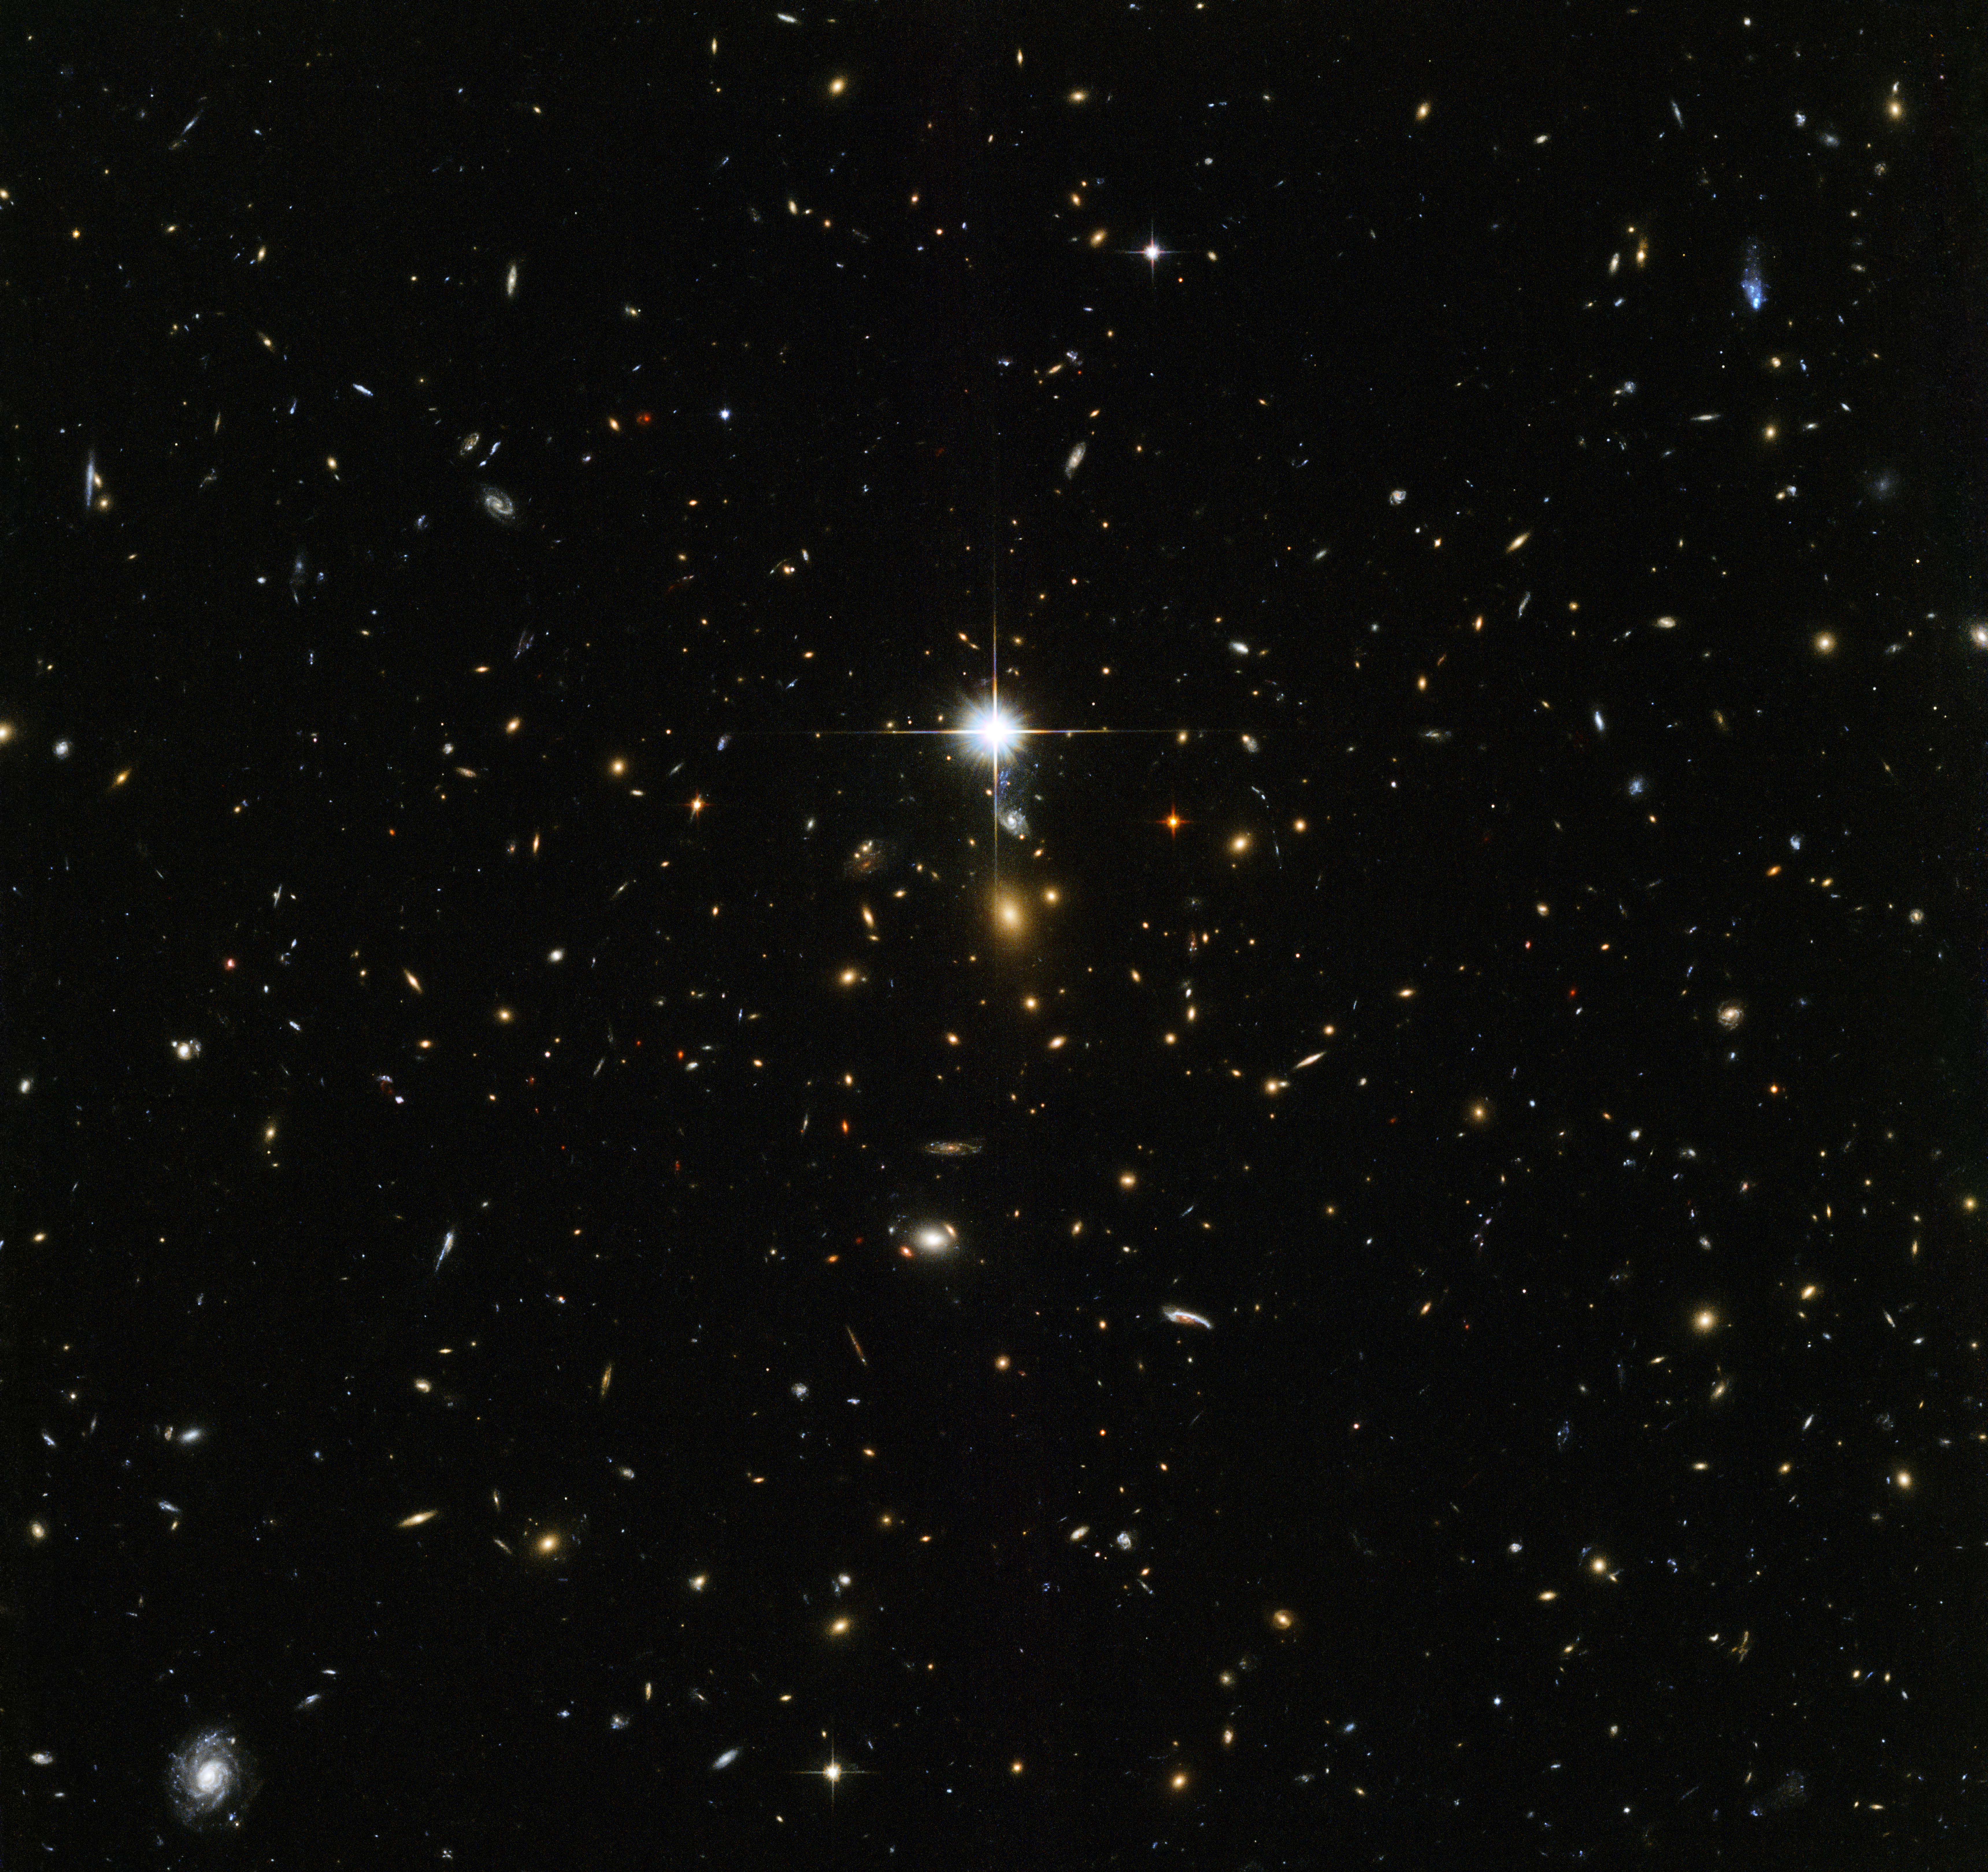

Cosmic archaeology

This NASA/ESA Hubble Space Telescope image is chock-full of galaxies — each glowing speck is a different galaxy, bar the bright flash in the middle of the image which is actually a star lying within our own galaxy that just happened to be in the way. At the centre of the image lies something especially interesting, the centre of the massive galaxy cluster called WHL J24.3324-8.477, including the brightest galaxy of the cluster.

The Universe contains structures on various scales — planets collect around stars, stars collect into galaxies, galaxies collect into groups, and galaxy groups collect into clusters. Galaxy clusters contain hundreds to thousands of galaxies bound together by gravity. Dark matter and dark energy play key roles in the formation and evolution of these clusters, so studying massive galaxy clusters can help scientists to unravel the mysteries of these elusive phenomena.

This infrared image was taken by Hubble’s Advanced Camera for Surveys and Wide-Field Camera 3 as part of an observing programme called RELICS (Reionization Lensing Cluster Survey). RELICS imaged 41 massive galaxy clusters with the aim of finding the brightest distant galaxies for the forthcoming NASA/ESA/CSA James Webb Space Telescope (JWST) to study. Such research will tell us more about our cosmic origins.

Credit: ESA/Hubble & NASA